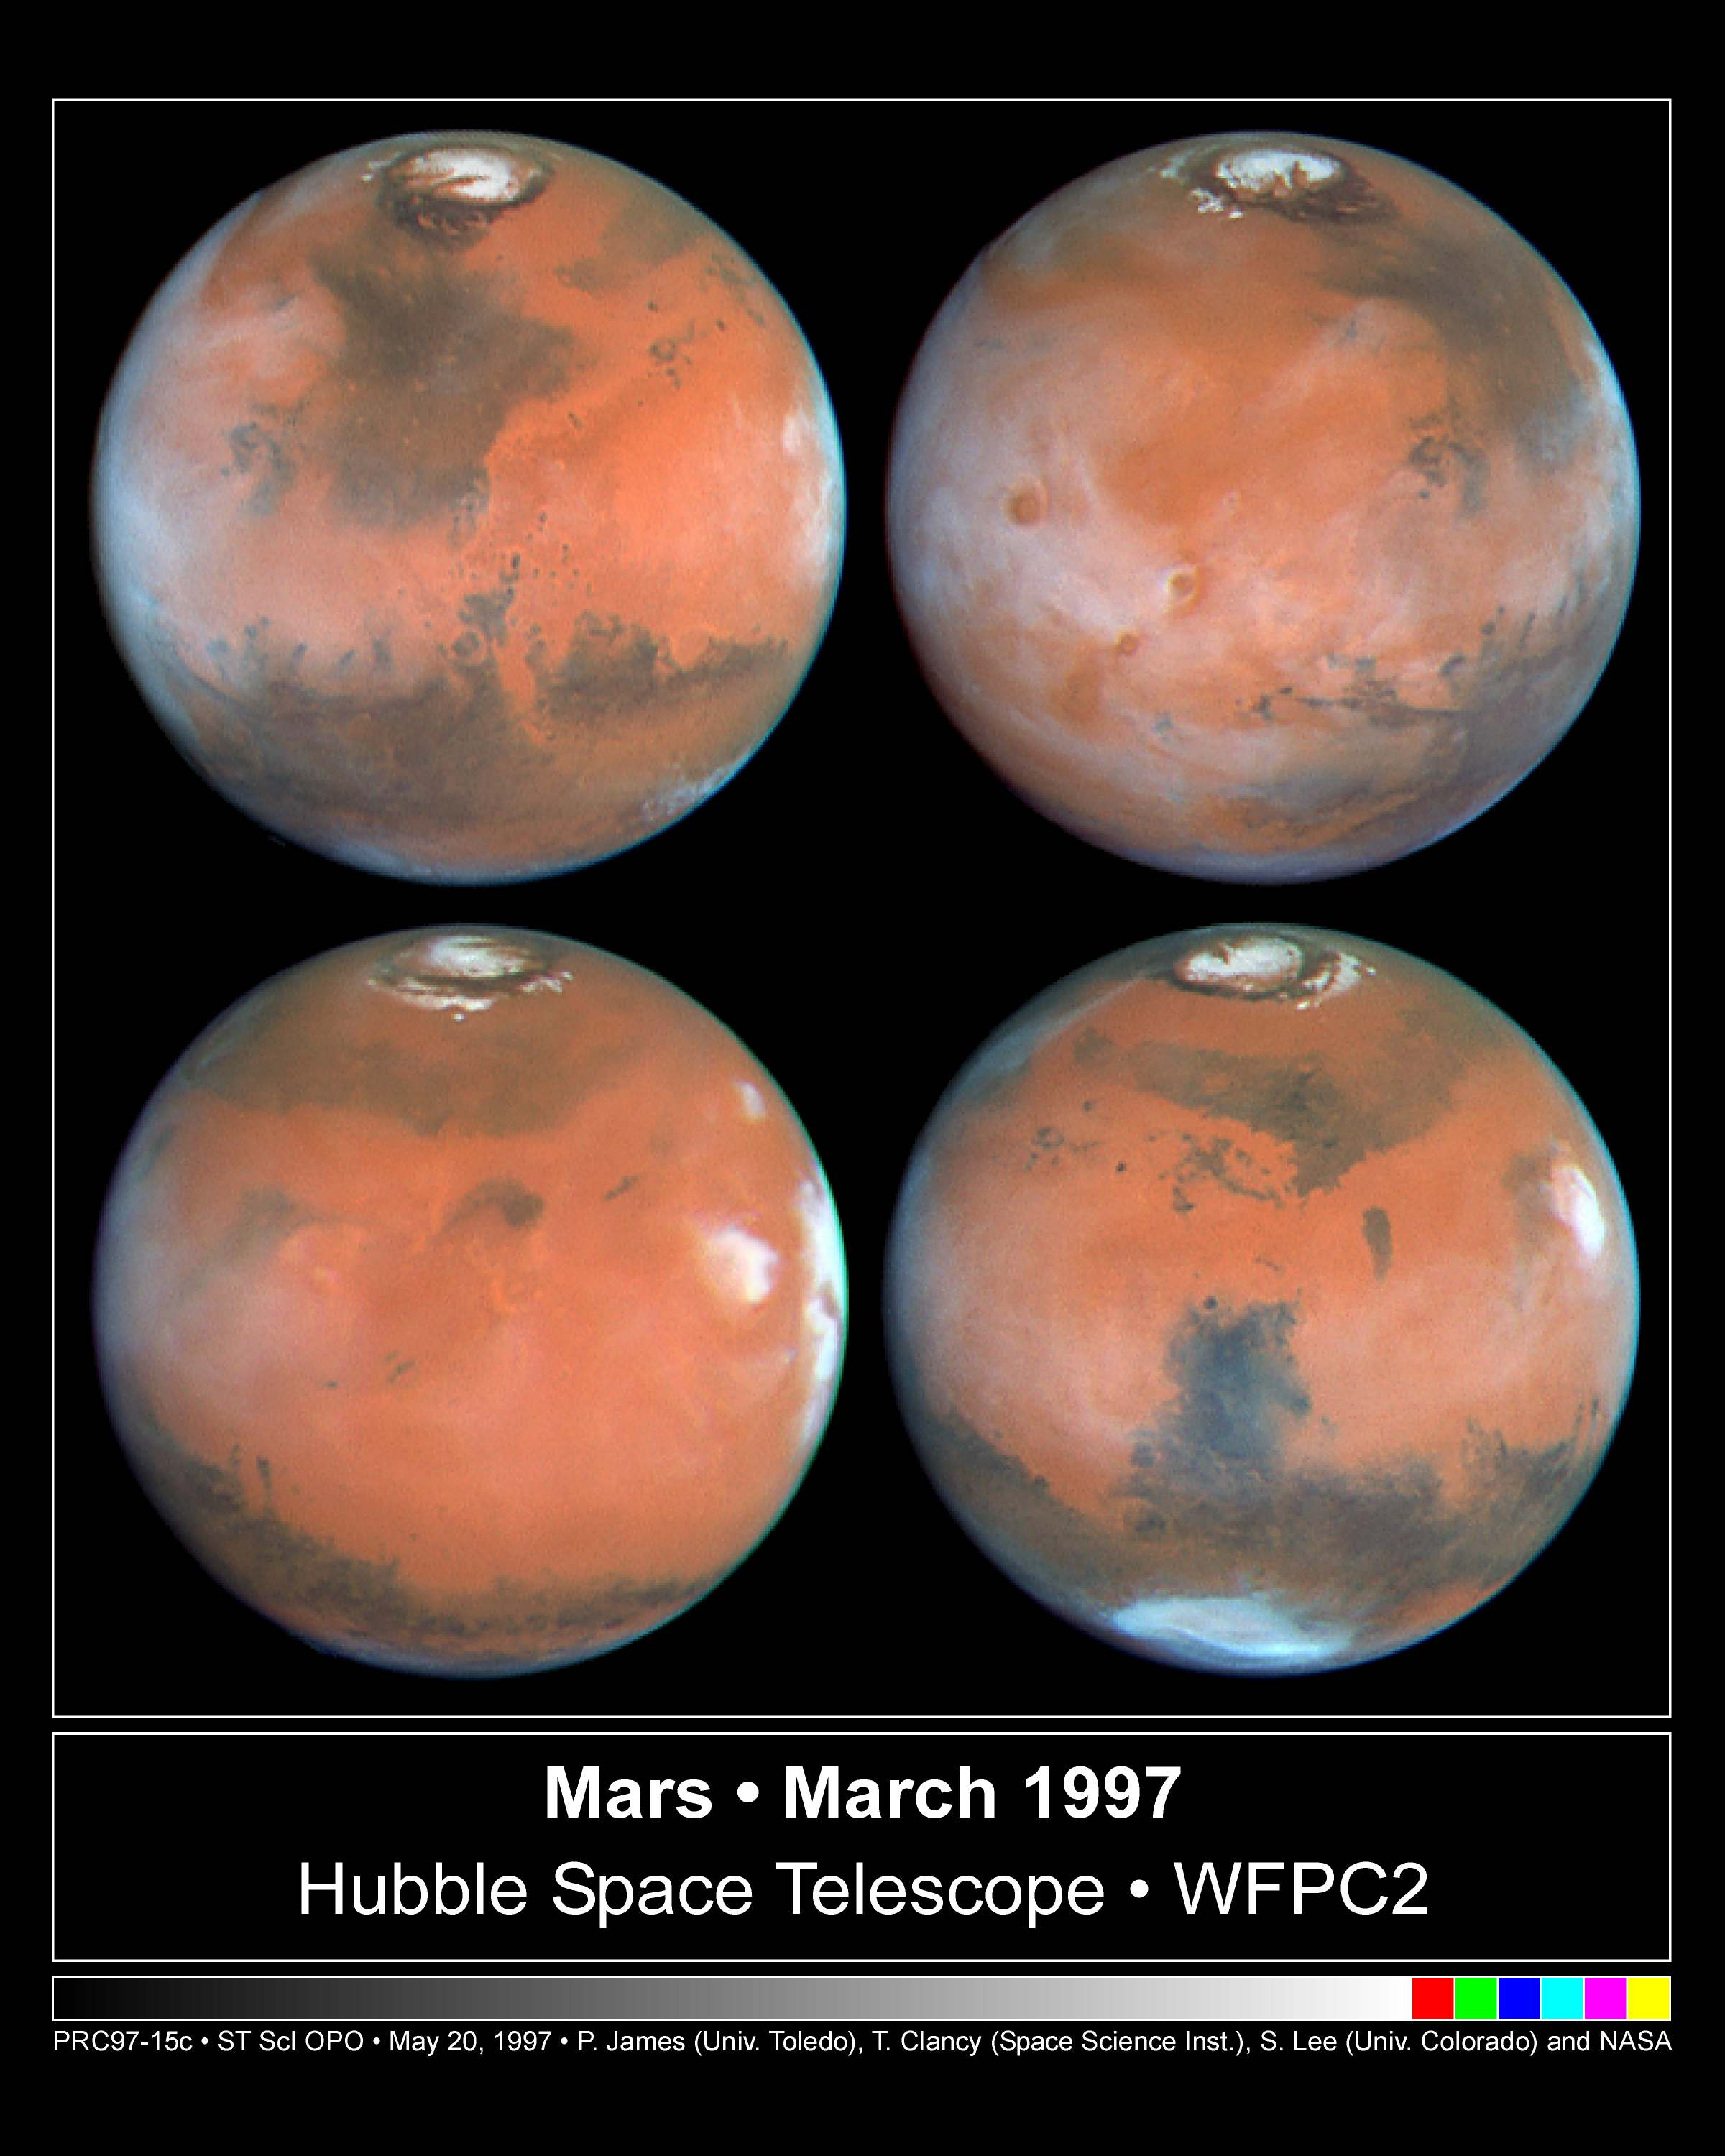

Four Views of Mars In Northern Summer

Four faces of Mars as seen on March 30, 1997 are presented in this montage of the Hubble Space Telescope images. Proceeding in the order upper-left, upper-right, lower-left, lower-right, Mars has rotated about ninety degrees between each successive time step. For example the Tharsis volcanoes, which are seen (between 7:30 and 9 o'clock positions) in mid-morning in the upper-right view, are seen near the late afternoon edge of the planet (about 3 o'clock position) in the lower-left image. All of these colour images are composed of individual red (673 nanometers), green (502 nm), and blue (410 nm) Planetary Camera exposures.

Credit: Phil James (Univ. Toledo), Todd Clancy (Space Science Inst., Boulder, CO), Steve Lee (Univ. Colorado), and NASA/ESA